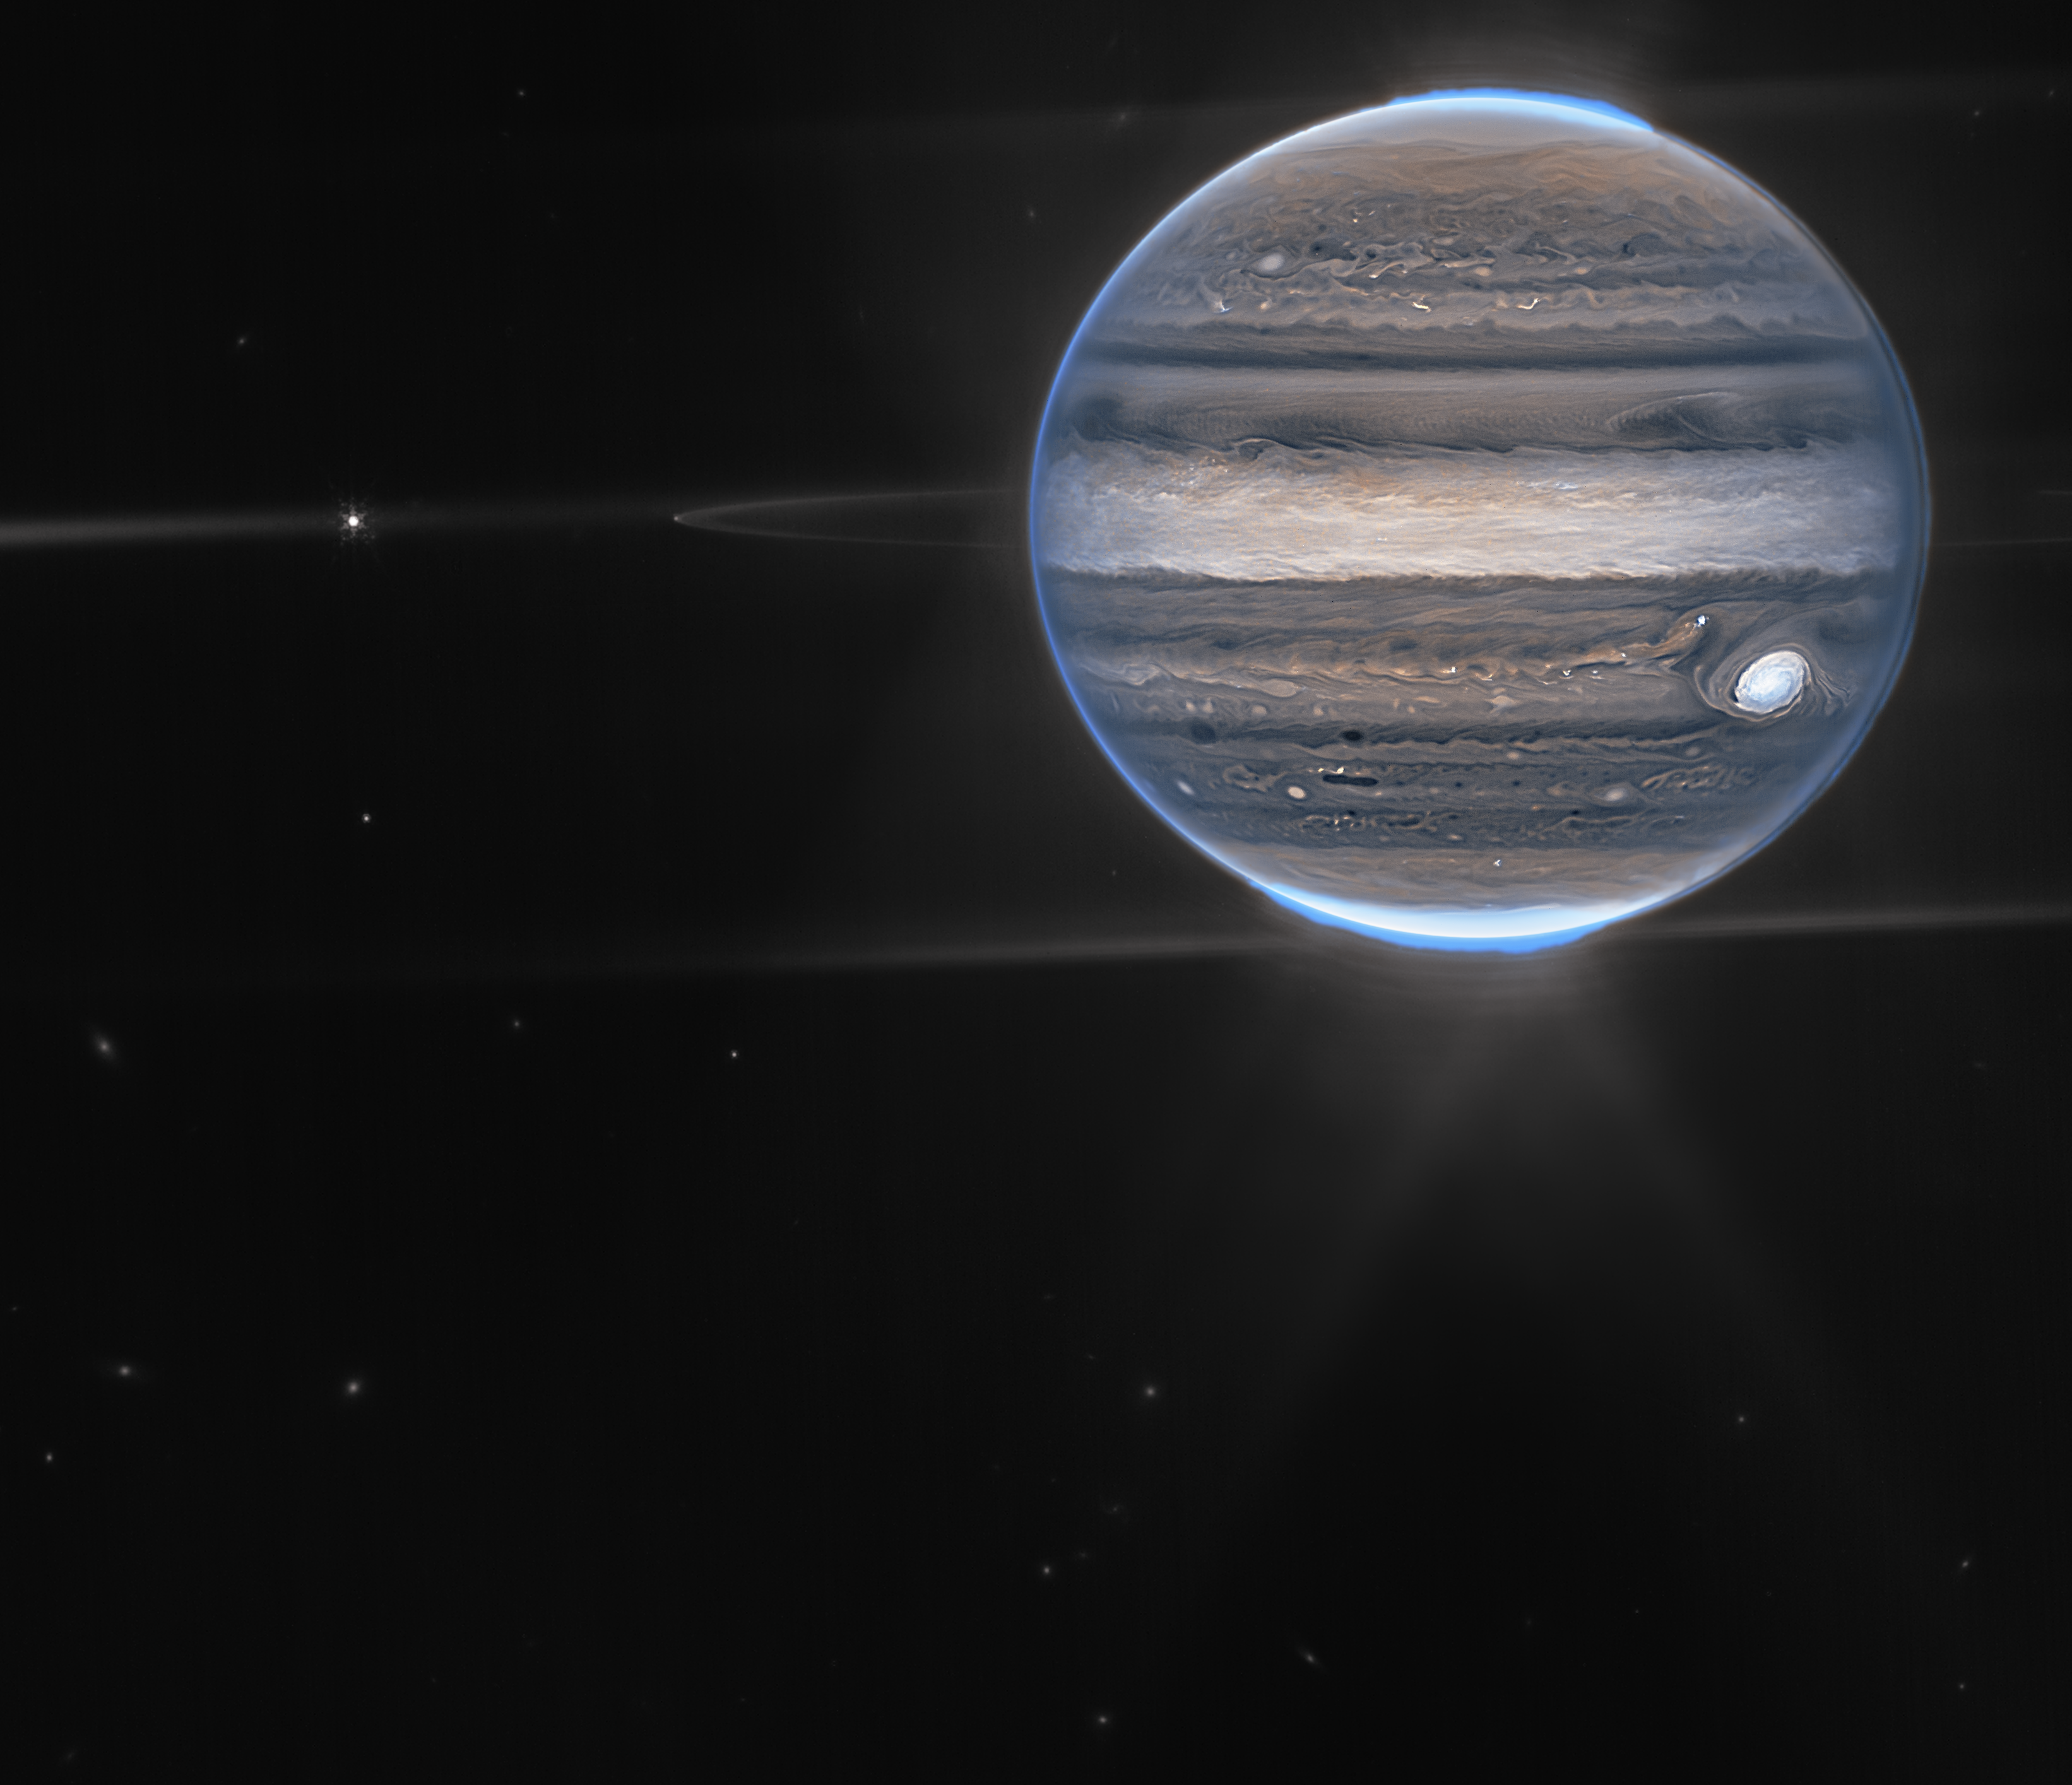

Jupiter Showcases Auroras, Hazes (NIRCam Widefield View)

With giant storms, powerful winds, auroras, and extreme temperature and pressure conditions, Jupiter has a lot going on. Now, the NASA/ESA/CSA James Webb Space Telescope has captured new images of the planet. Webb’s Jupiter observations will give scientists even more clues to Jupiter’s inner life.

In this wide-field view, Webb sees Jupiter with its faint rings, which are a million times fainter than the planet, and two tiny moons called Amalthea and Adrastea. The fuzzy spots in the lower background are likely galaxies “photobombing” this Jovian view.

This is a composite image from Webb’s NIRCam instrument (two filters) and was acquired on 27 July 2022.

Credit: NASA, ESA, Jupiter ERS Team; image processing by Ricardo Hueso (UPV/EHU) and Judy Schmidt